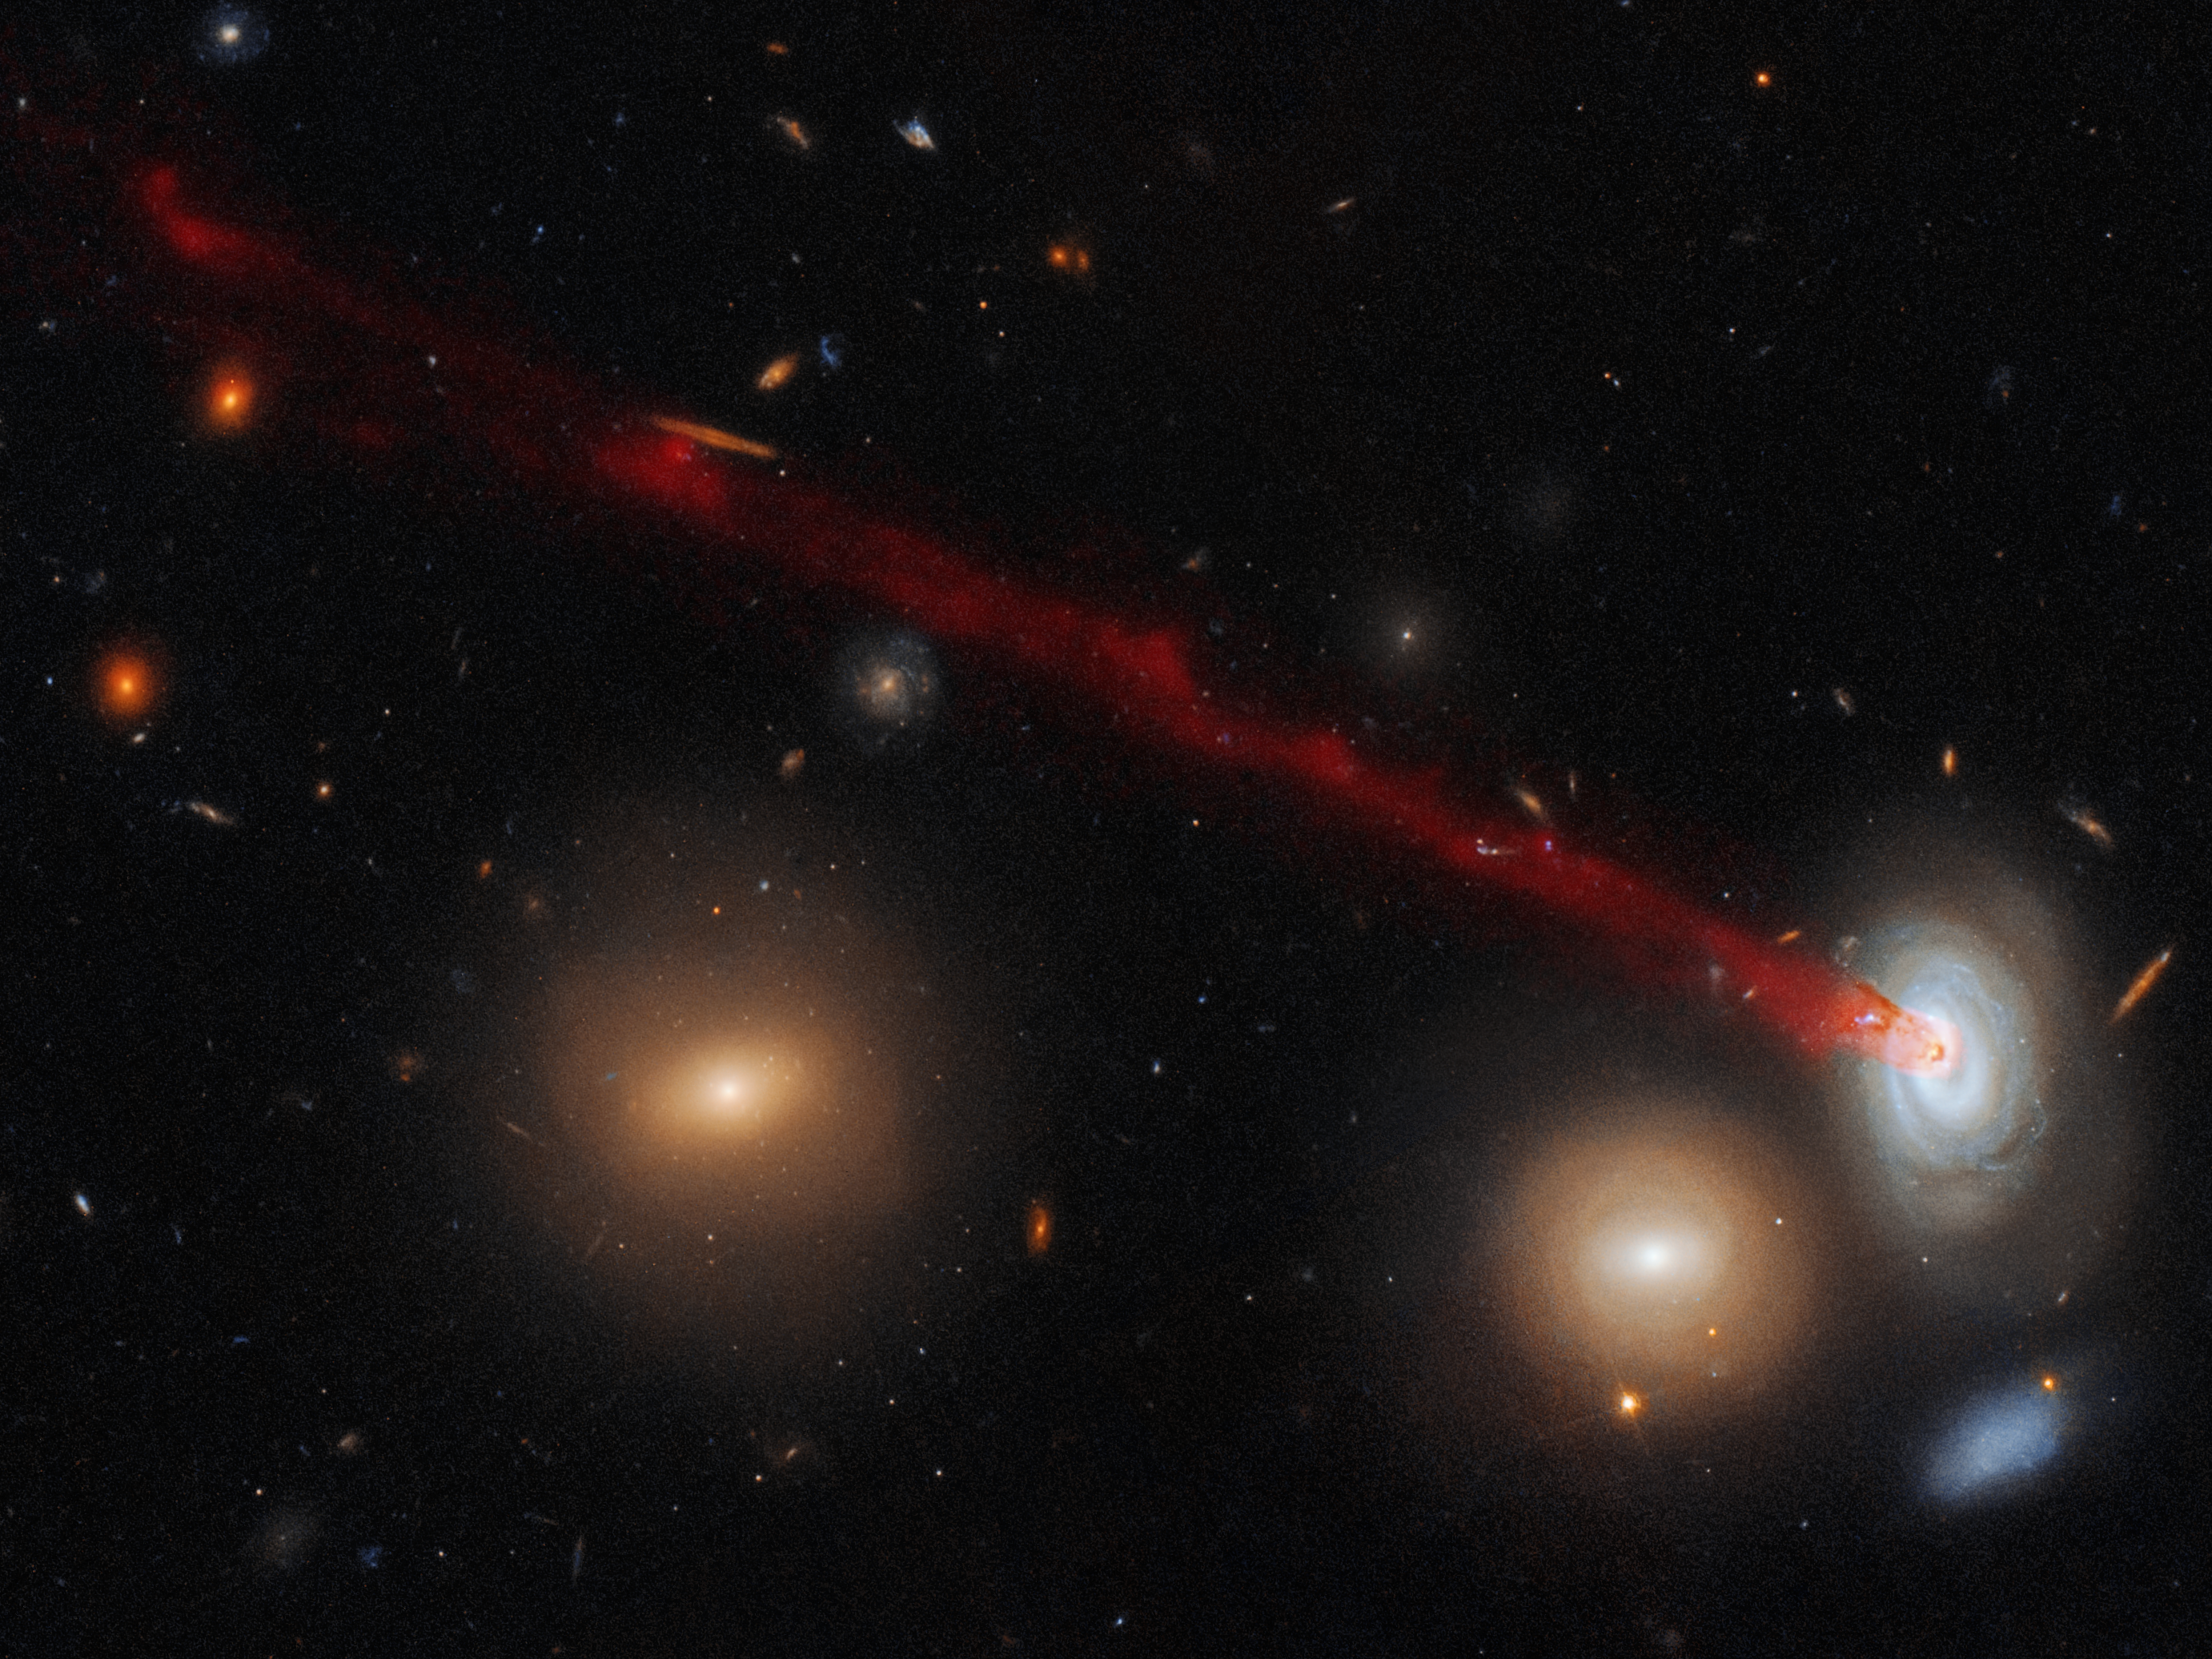

Wading through water

This striking image combines data gathered with the Advanced Camera for Surveys, installed on the NASA/ESA Hubble Space Telescope and data from the Subaru Telescope in Hawaii. It shows just a part of the spectacular tail emerging from a spiral galaxy nicknamed D100.

Tails such as these are created by a process known as ram-pressure stripping. Despite appearances, the space between galaxies in a cluster is far from empty; it is actually filled with superheated gas and plasma, which drags and pulls at galaxies as they move through it, a little like the resistance one experiences when wading through deep water. This can be strong enough to tear galaxies apart, and often results in objects with peculiar, bizarre shapes and features — as seen here.

D100’s eye-catching tail of gas, which stretches far beyond this image to the left, is a particularly striking example of this phenomenon. The galaxy is a member of the huge Coma cluster. The pressure from the cluster’s hot constituent plasma (known as the intracluster medium) has stripped gas from D100 and torn it away from the galaxy’s main body, and drawing it out into the plume pictured here.

Densely populated clusters such as Coma are home to thousands of galaxies. They are thus the perfect laboratories in which to study the intriguing phenomenon of ram-pressure stripping, which, as well as producing beautiful images such as this, can have a profound effect on how galaxies evolve and form new generations of stars.

Credit: ESA/Hubble & NASA, Cramer et al.